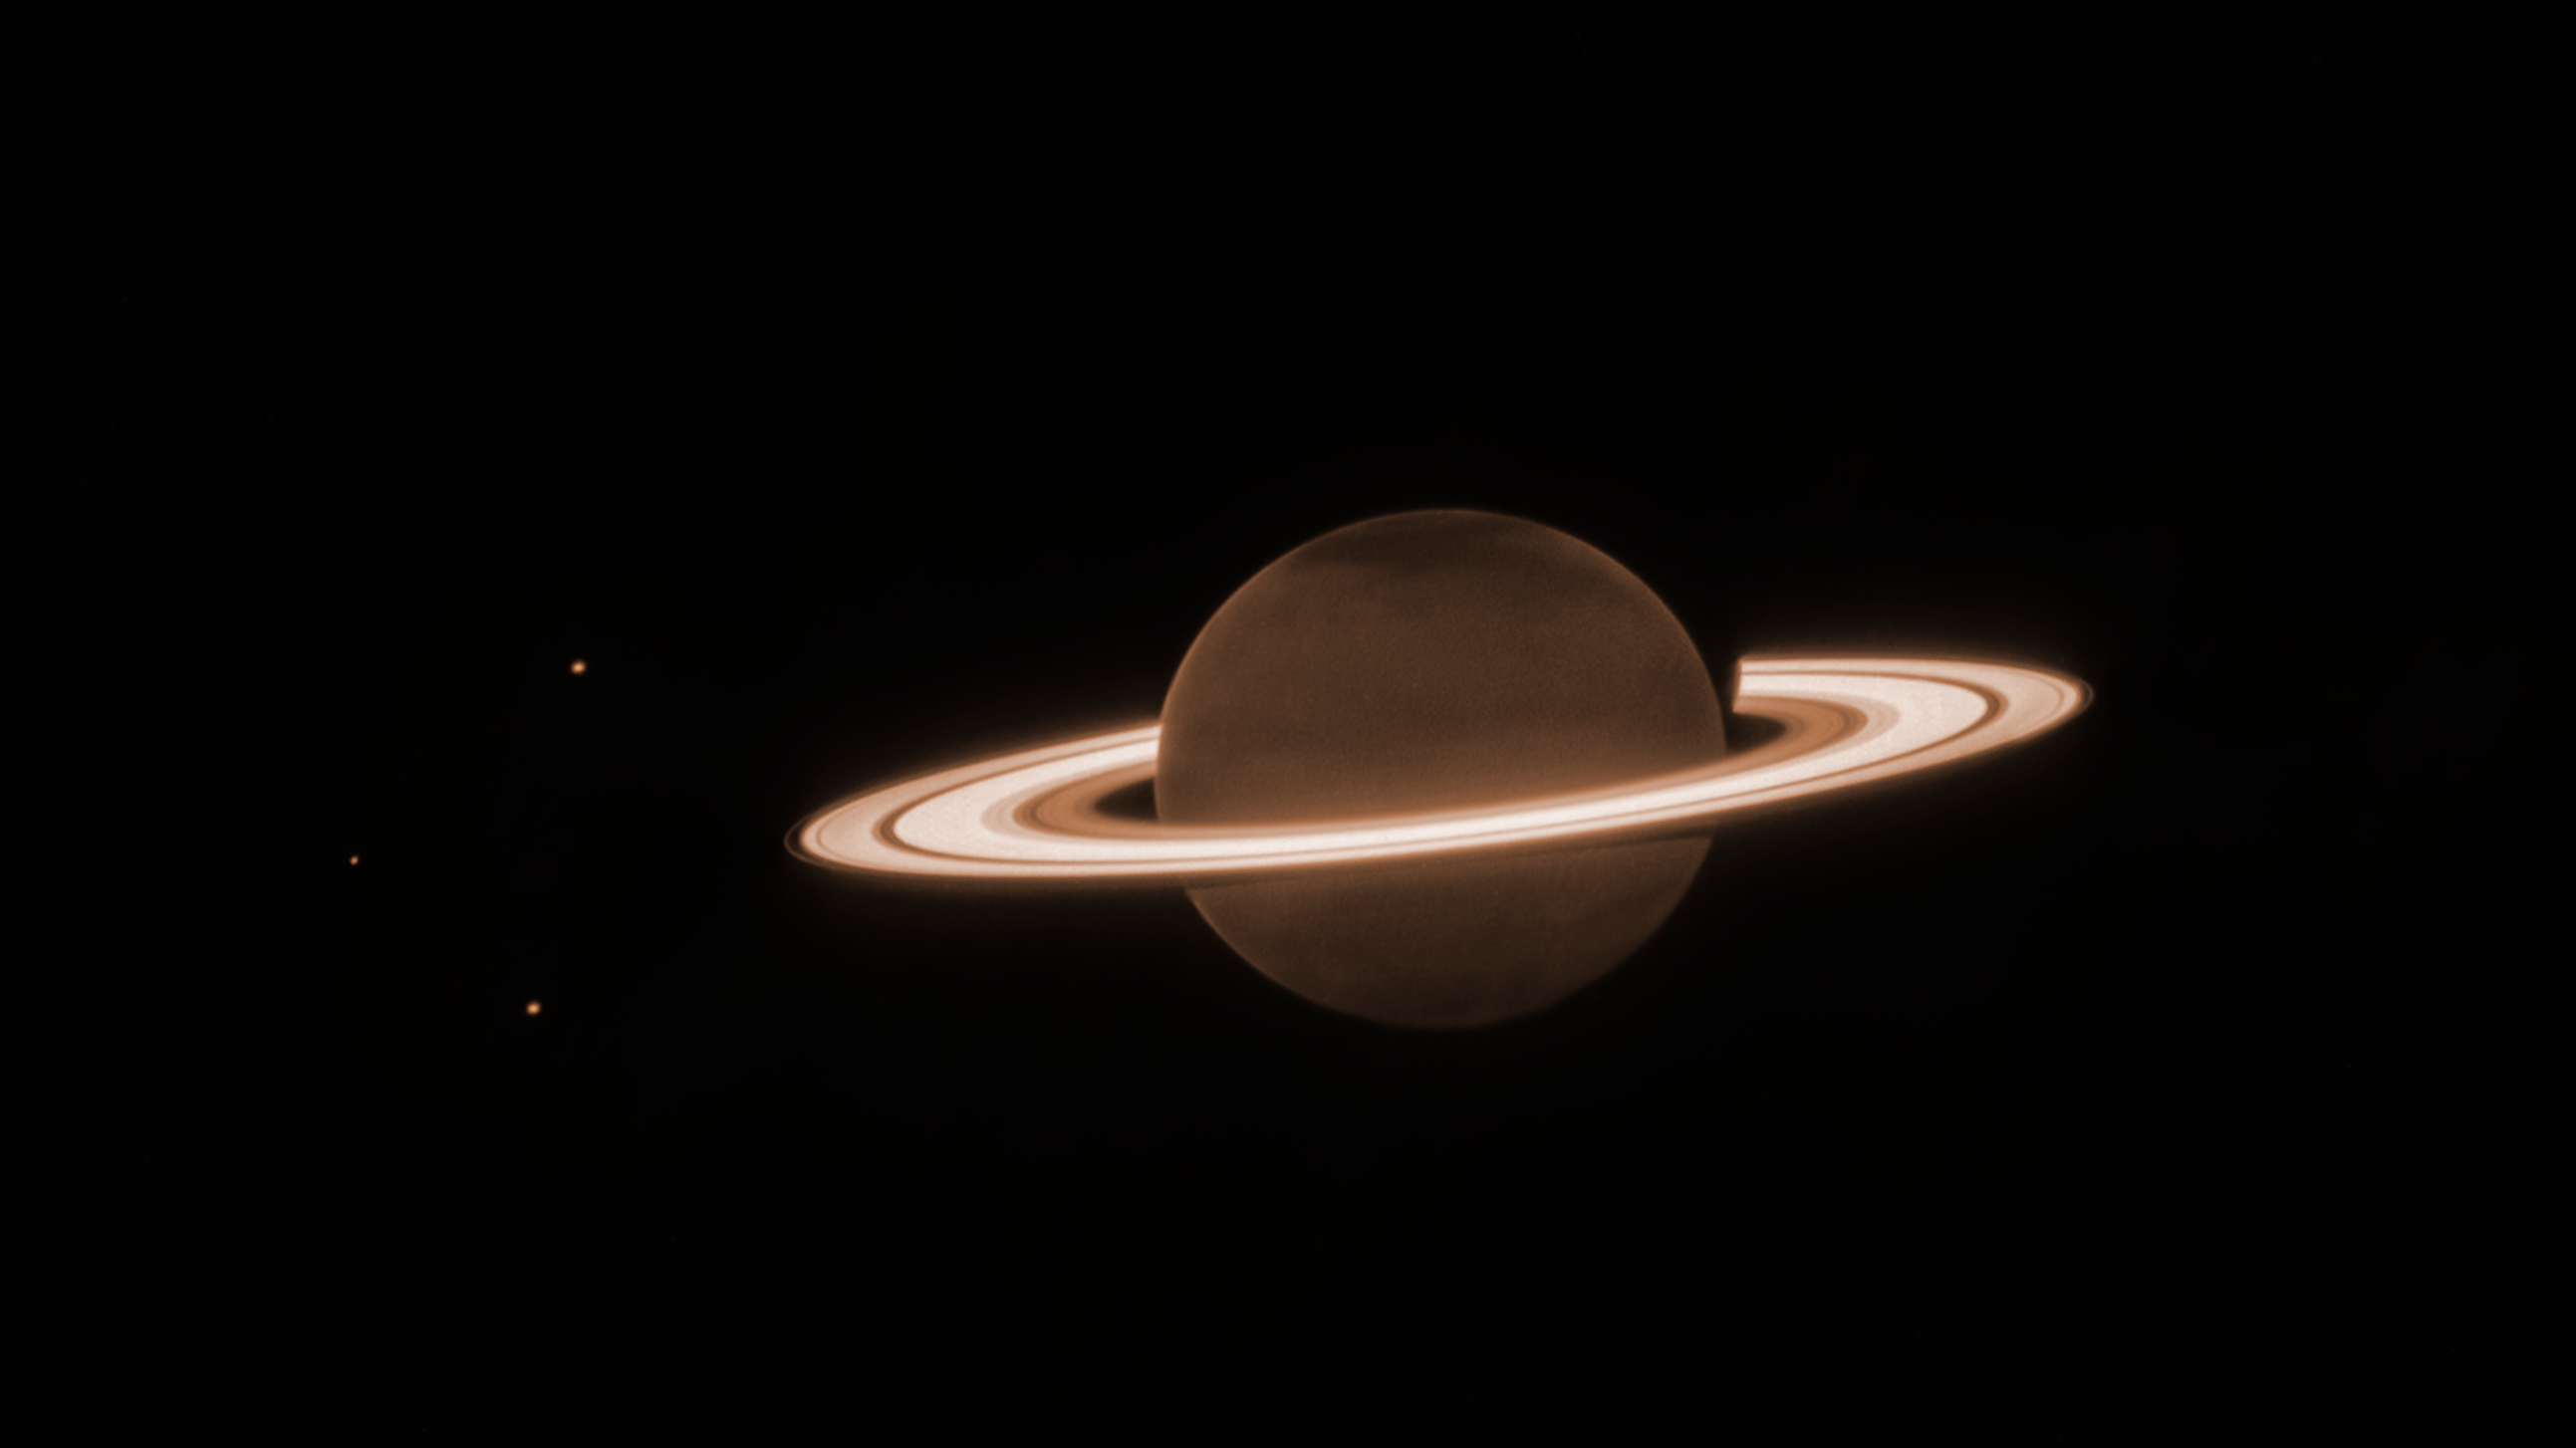

Saturn’s rings shine in Webb’s observations of ringed planet

On 25 June 2023, the NASA/ESA/CSA James Webb Space Telescope turned to famed ringed world Saturn for its first near-infrared observations of the planet. The initial imagery from Webb’s NIRCam (Near-Infrared Camera) is already fascinating researchers.

Saturn itself appears extremely dark at this infrared wavelength observed by the telescope, as methane gas absorbs almost all of the sunlight falling on the atmosphere. However, the icy rings stay relatively bright, leading to the unusual appearance of Saturn in the Webb image.

This image was taken as part of Webb Guaranteed Time Observation program 1247. The program included several very deep exposures of Saturn, which were designed to test the telescope’s capacity to detect faint moons around the planet and its bright rings. Details in the orbital characteristics of newly discovered moons could help scientists put together a more complete picture of the current system of Saturn, as well as its past.

This new image of Saturn clearly shows details within the planet’s ring system, along with several of the planet’s moons – Dione, Enceladus, and Tethys. Additional deeper exposures (not shown here) will allow the team to probe some of the planet’s fainter rings, not visible in this image, including the thin G ring and the diffuse E ring. Saturn’s rings are made up of an array of rocky and icy fragments – the particles range in size from smaller than a grain of sand to a few as large as mountains on Earth. Researchers recently used Webb to explore Enceladus, and found a large plume jetting from the southern pole of the moon that contains both particles and plentiful amounts of water vapor – this plume feeds Saturn’s E ring.

Saturn’s atmosphere also shows surprising and unexpected detail. This is the first time that the planet’s atmosphere has been seen with such clarity at this particular wavelength (3.23 microns). The large, dark, diffuse structures in the northern hemisphere do not follow the planet’s lines of latitude, so this image is lacking the familiar striped appearance that is typically seen from Saturn’s deeper atmospheric layers. The patchiness is reminiscent of large-scale planetary waves in the stratospheric aerosols high above the main clouds, potentially similar to those seen in early Webb NIRCam observations of Jupiter.

When comparing the northern and southern poles of the planet in this image, the differences in appearance are typical with known seasonal changes on Saturn. For example, Saturn is currently experiencing northern summertime, with the southern hemisphere emerging from the darkness at the end of a winter. However, the northern pole is particularly dark, perhaps due to an unknown seasonal process affecting polar aerosols in particular. A tiny hint of brightening towards the edge of Saturn’s disk might be due to high-altitude methane fluorescence (the process of emitting light after absorbing light), emission from the trihydrogen ion (H3+) in the ionosphere, or both; spectroscopy from Webb could help confirm this.

Missions like NASA’s Pioneer 11, Voyagers 1 and 2, the Cassini spacecraft, and the NASA/ESA Hubble Space Telescope have tracked Saturn’s atmosphere and rings for many decades. These observations from Webb are just a hint at what this observatory will add to Saturn’s story in the coming years as the science team delves deep into the data to prepare peer-reviewed results.

Note: This content highlights data from Webb science in progress, which has not yet been through the peer-review process.

Credit: NASA, ESA, CSA, STScI, M. Tiscareno (SETI Institute), M. Hedman (University of Idaho), M. El Moutamid (Cornell University), M. Showalter (SETI Institute), L. Fletcher (University of Leicester), H. Hammel (AURA), J. DePasquale (STScI)